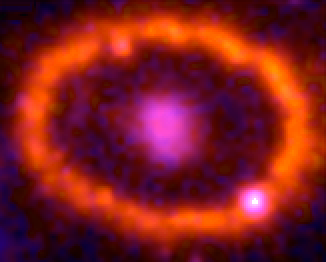

Supernova 1987A: February 6, 1998

This Hubble telescope image shows the supernova's triple-ring system, including the bright spots along the inner ring of gas surrounding the exploded star. A shock wave of material unleashed by the stellar blast is slamming into regions along the inner ring, heating them up, and causing them to glow. The ring, about a light-year across, was probably shed by the star about 20 000 years before it exploded.

Credit: NASA, ESA, and R. Kirshner (Harvard-Smithsonian Center for Astrophysics)